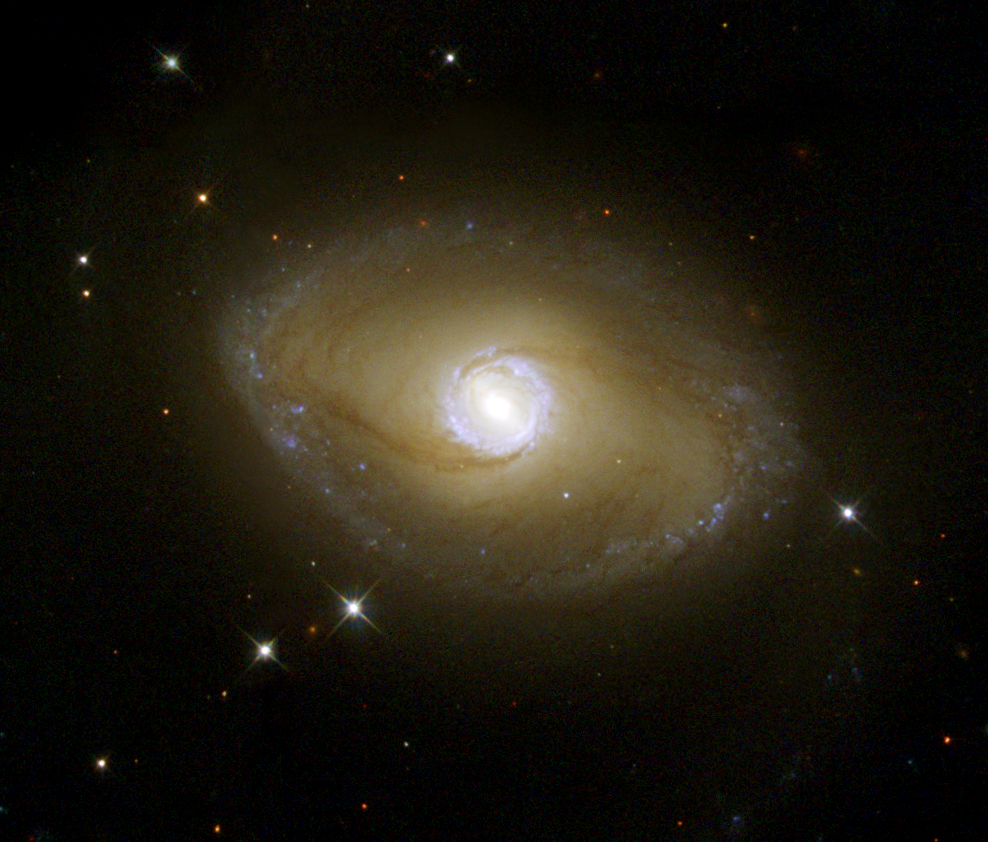

Hubble Reveals Ultraviolet Galactic Ring

The appearance of a galaxy can depend strongly on the colour of the light with which it is viewed. This Hubble Heritage image of NGC 6782 illustrates a pronounced example of this effect. This spiral galaxy, when seen in visible light, exhibits tightly wound spiral arms that give it a pinwheel shape similar to that of many other spirals. However, when the galaxy is viewed in ultraviolet light with NASA/ESA Hubble Space Telescope, its shape is startlingly different.

Credit: NASA/ESA and The Hubble Heritage Team (STScI/AURA)